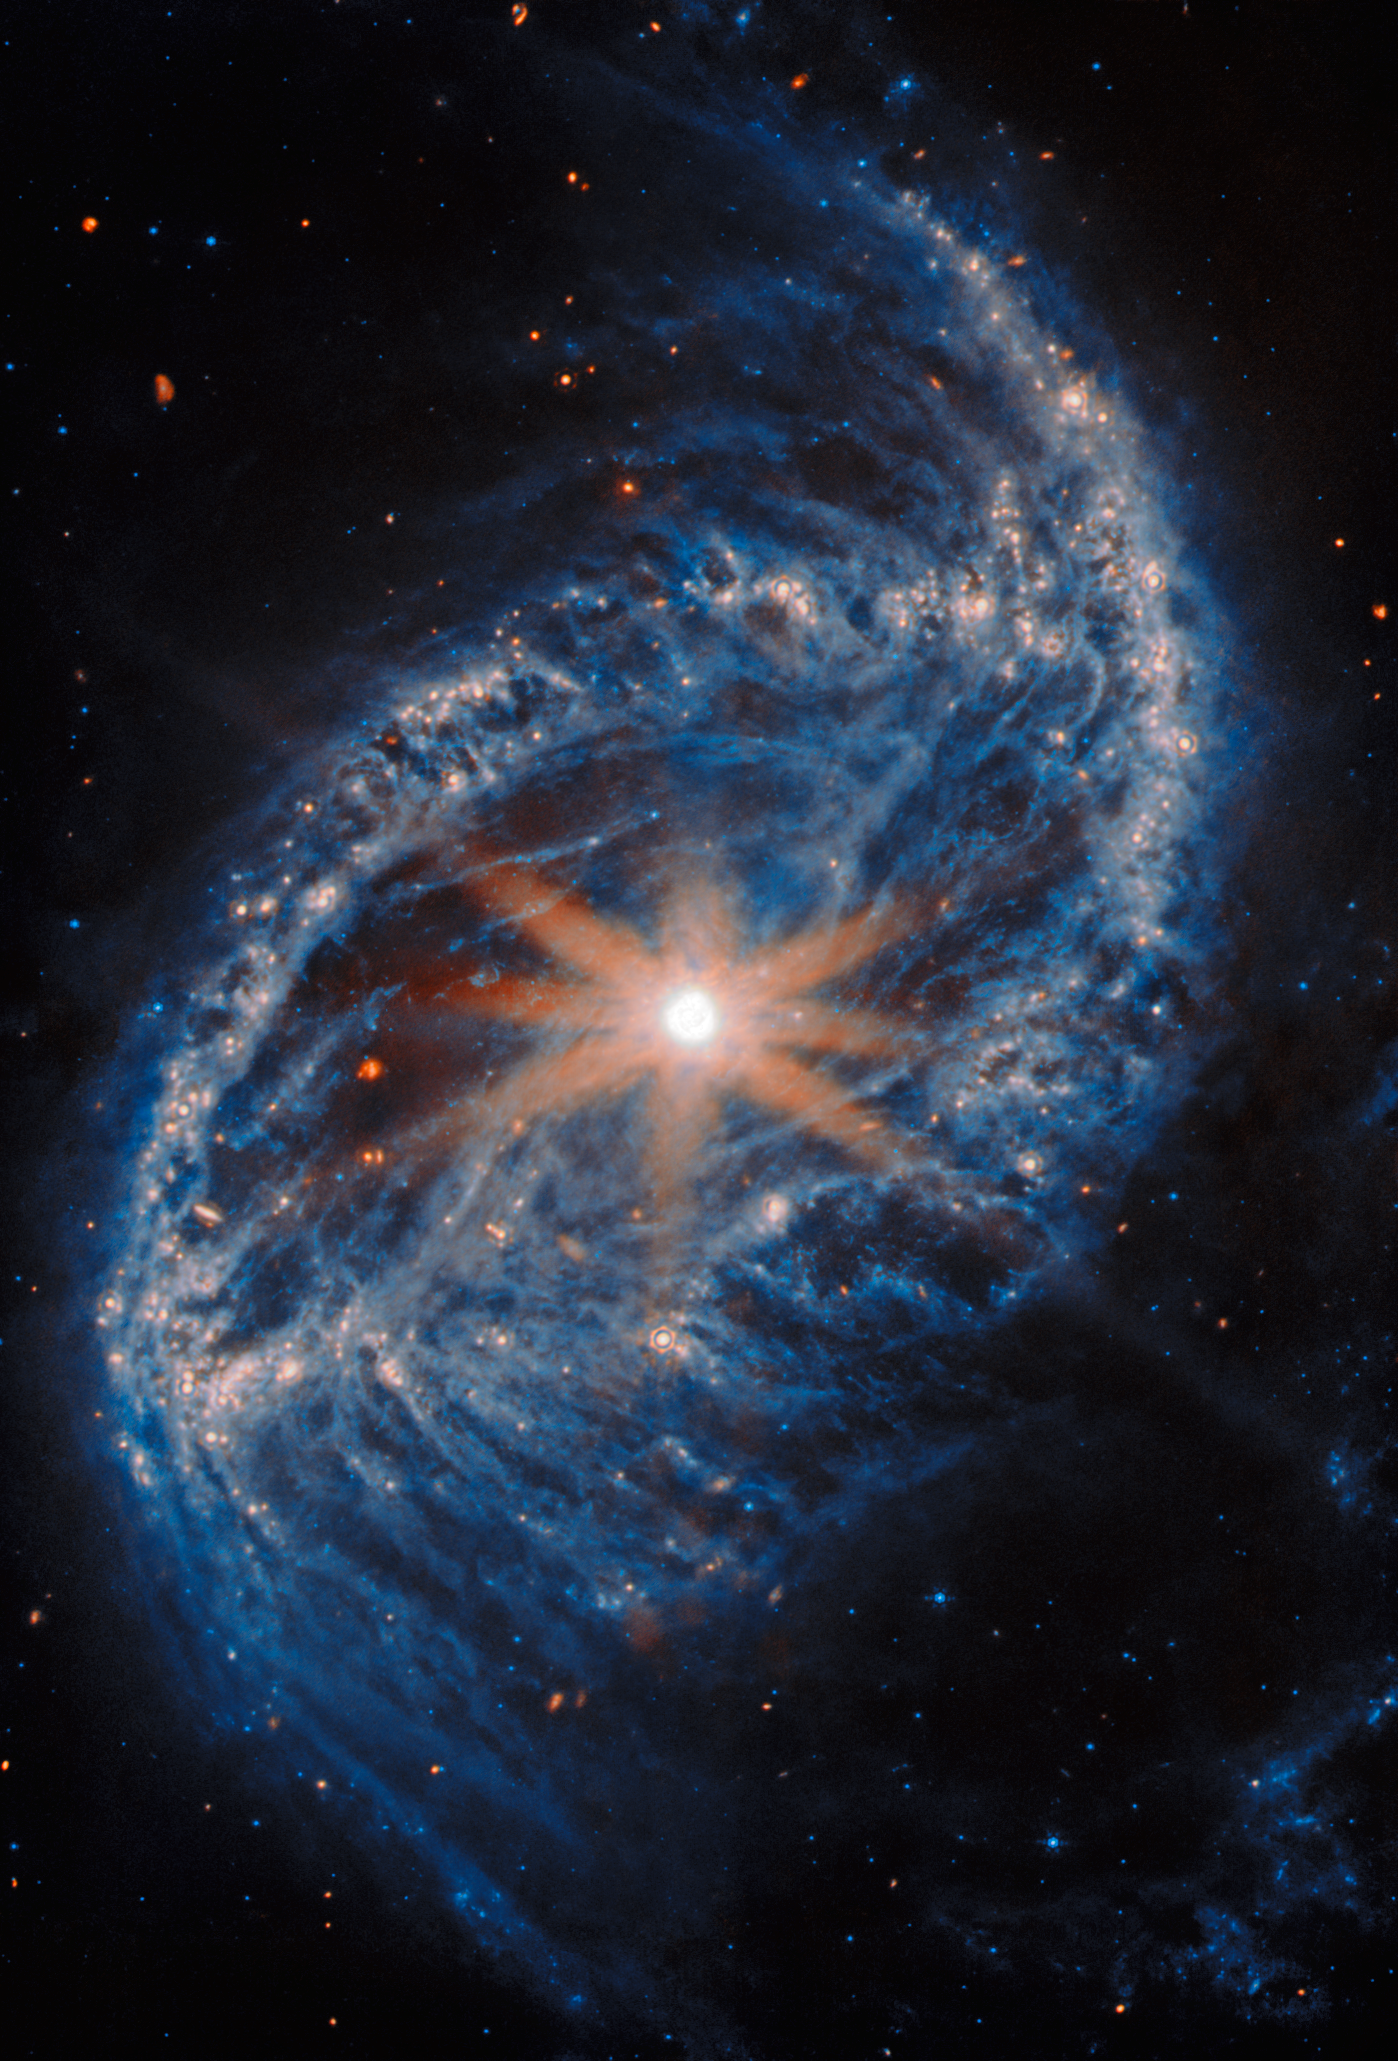

NGC 2566 (MIRI image)

The galaxy filling the frame in this NASA/ESA/CSA James Webb Space Telescope Picture of the Month is NGC 2566, a spiral galaxy located in the constellation Puppis. In this image Webb’s Mid-InfraRed Instrument (MIRI) puts the thick clouds of interstellar dust that suffuse NGC 2566 on display, as well as the galaxy’s compact, bright core.

At 76 million light-years away, NGC 2566 is considered a nearby galaxy, making it an excellent target for studying fine details like star clusters and gas clouds. The new Webb images of NGC 2566 were collected as part of an observing programme (#3707) dedicated to understanding the connections between stars, gas and dust in nearby star-forming galaxies. NGC 2566 is just one of the 55 galaxies in the local Universe examined by Webb for this programme.

To gain a full understanding of the star-formation process in nearby galaxies, astronomers will combine Webb data with observations from other telescopes. At the long-wavelength end of the electromagnetic spectrum, the 66 radio dishes of the Atacama Large Millimeter/submillimeter Array (ALMA) provide a detailed view of the cold, turbulent clouds where stars are born. The NASA/ESA Hubble Space Telescope has also cast its gaze on NGC 2566, and a new Hubble image of this galaxy was released earlier this week. The Hubble data will help researchers take a census of the stars in nearby galaxies, especially the young stars that are bright at the ultraviolet and visible wavelengths to which Hubble is sensitive. Together, the Webb, Hubble and ALMA data provide a rich view of the cold gas, warm dust and brilliant stars in NGC 2566.

The Webb data are part of a Treasury programme, which means that the data may help answer multiple important questions about our Universe. Treasury data are available for use by scientists and the public without a waiting period, amplifying the scientific impact and allowing exploration to begin immediately.

Credit: ESA/Webb, NASA & CSA, A. Leroy